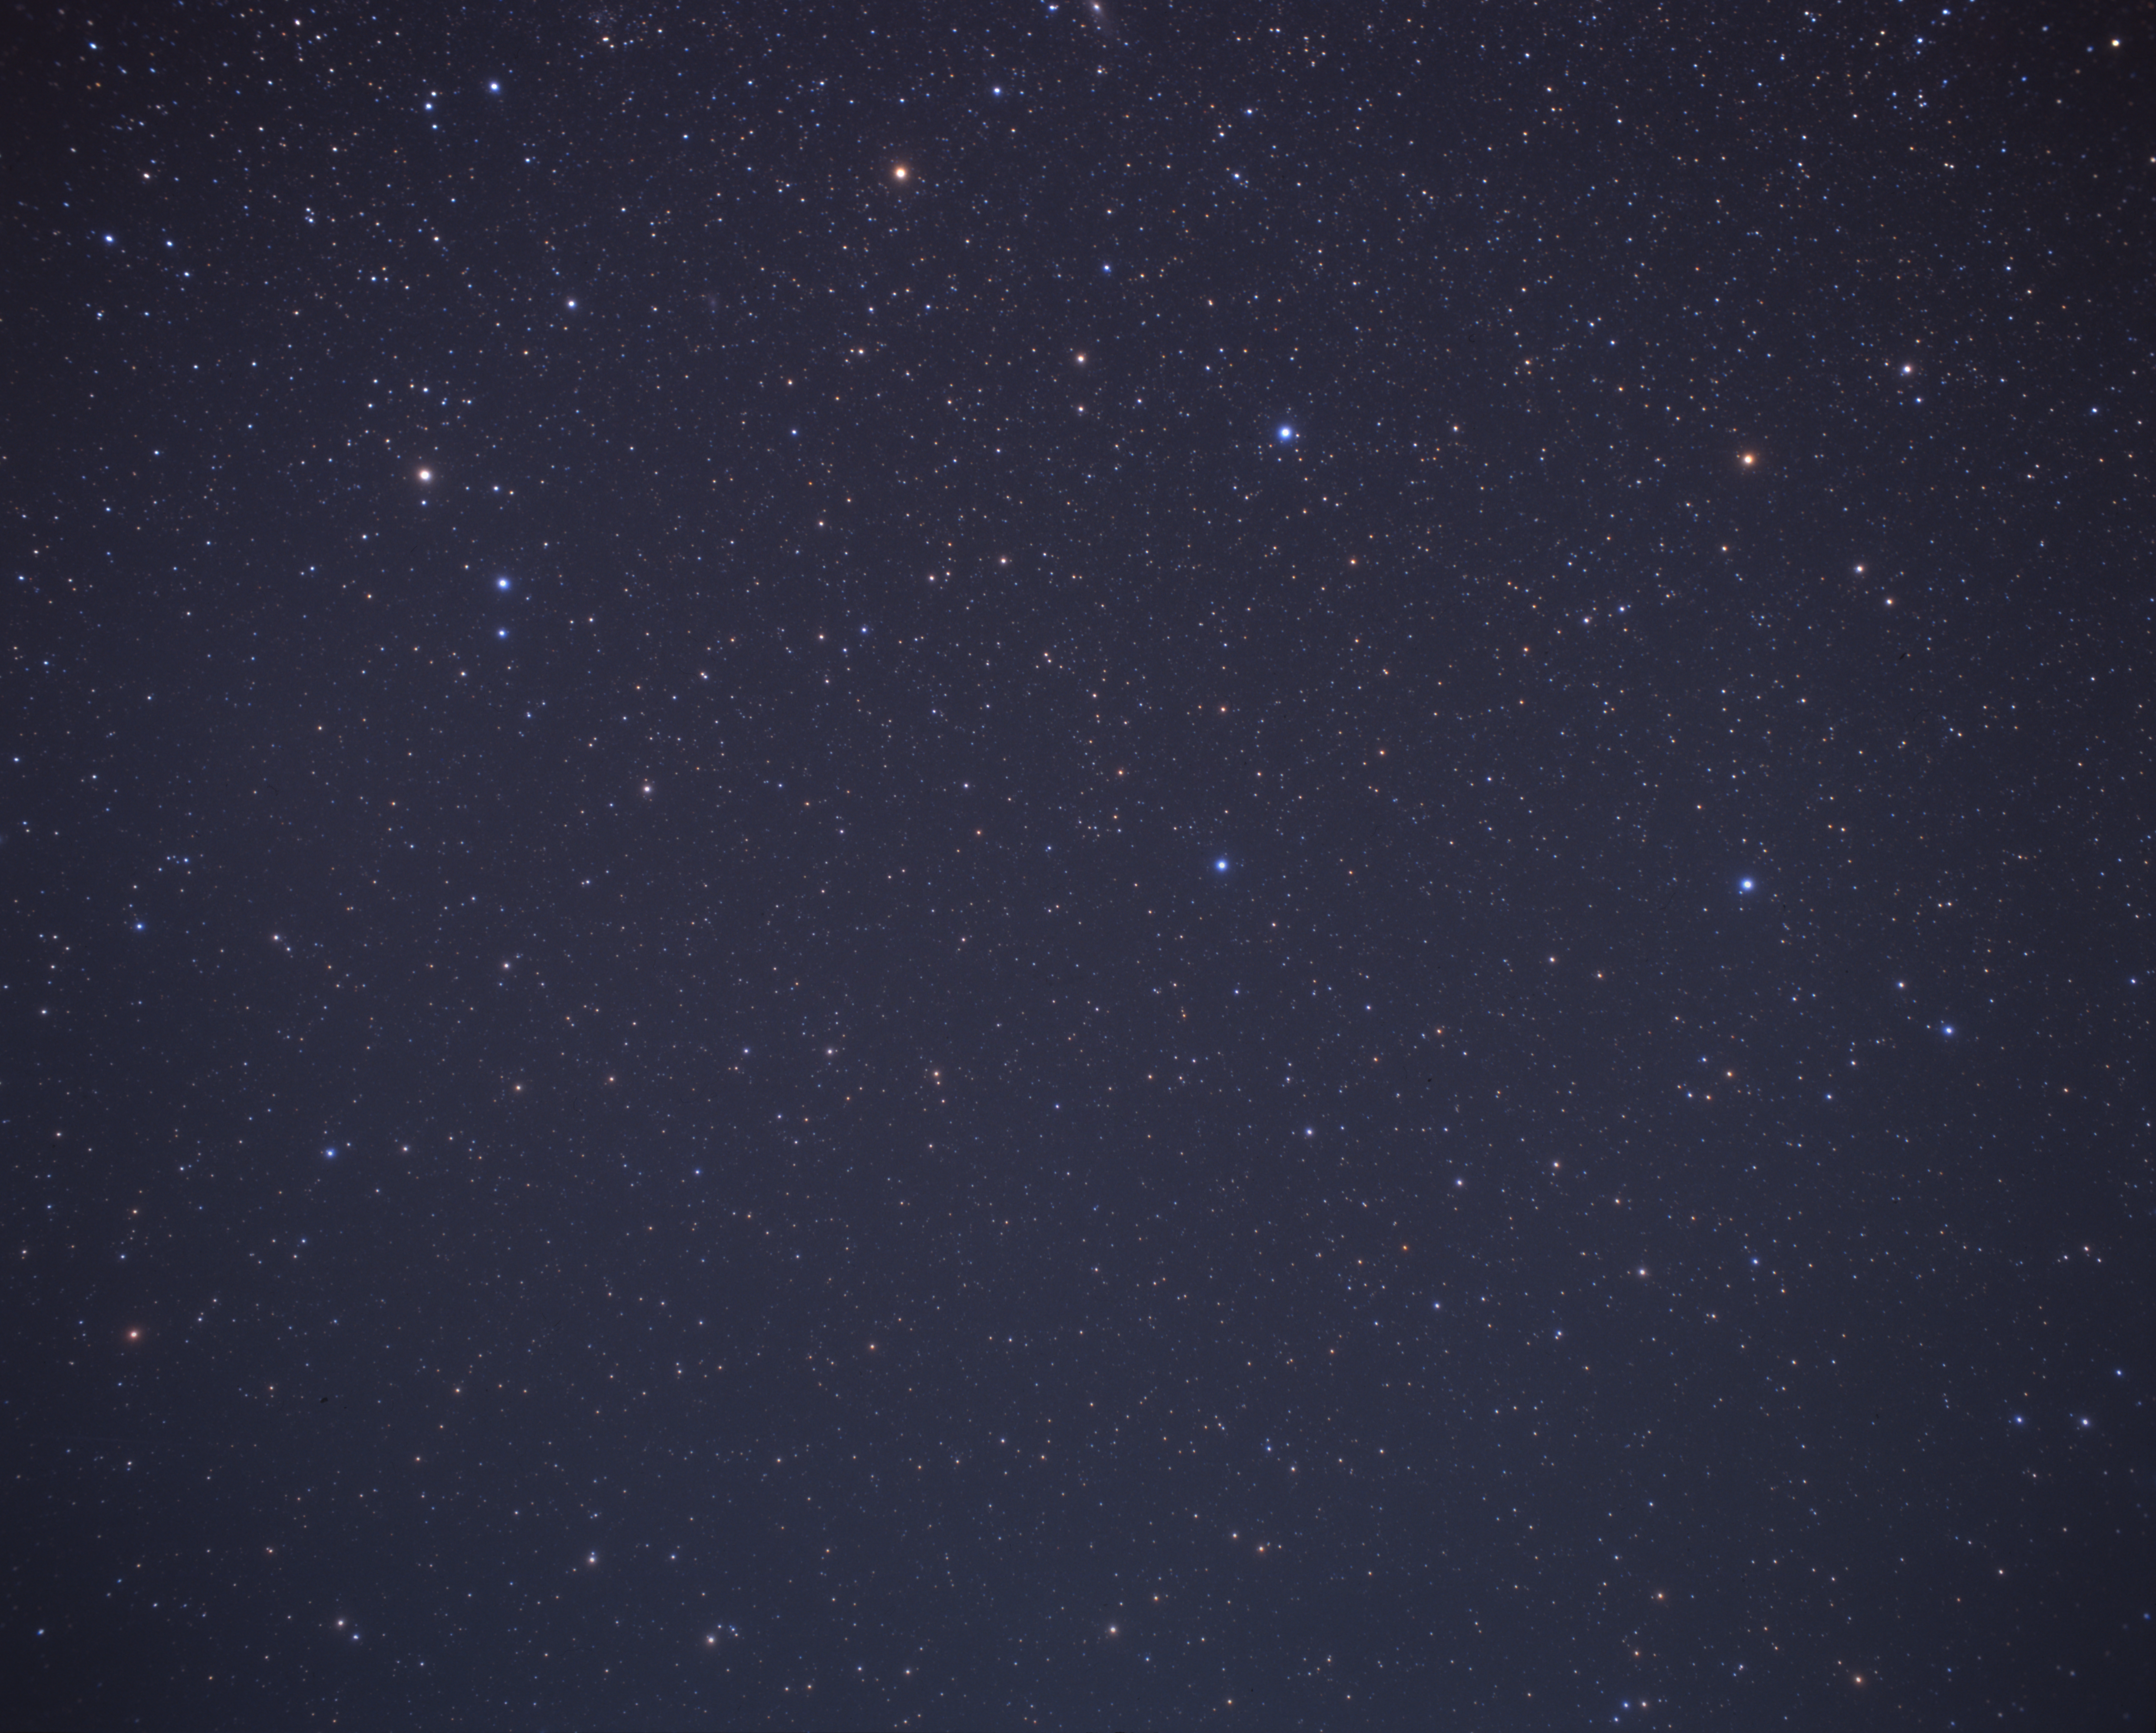

Ground-based, wide-field image of the ZwCl0024+1652 region

Wide-field image of the night sky. On the right is the asterism "Great Square of Pegasus", and to the left is the constellation of Pisces, in which the cluster of galaxies ZwCl0024+1652 is located.

Credit: A. Fujii